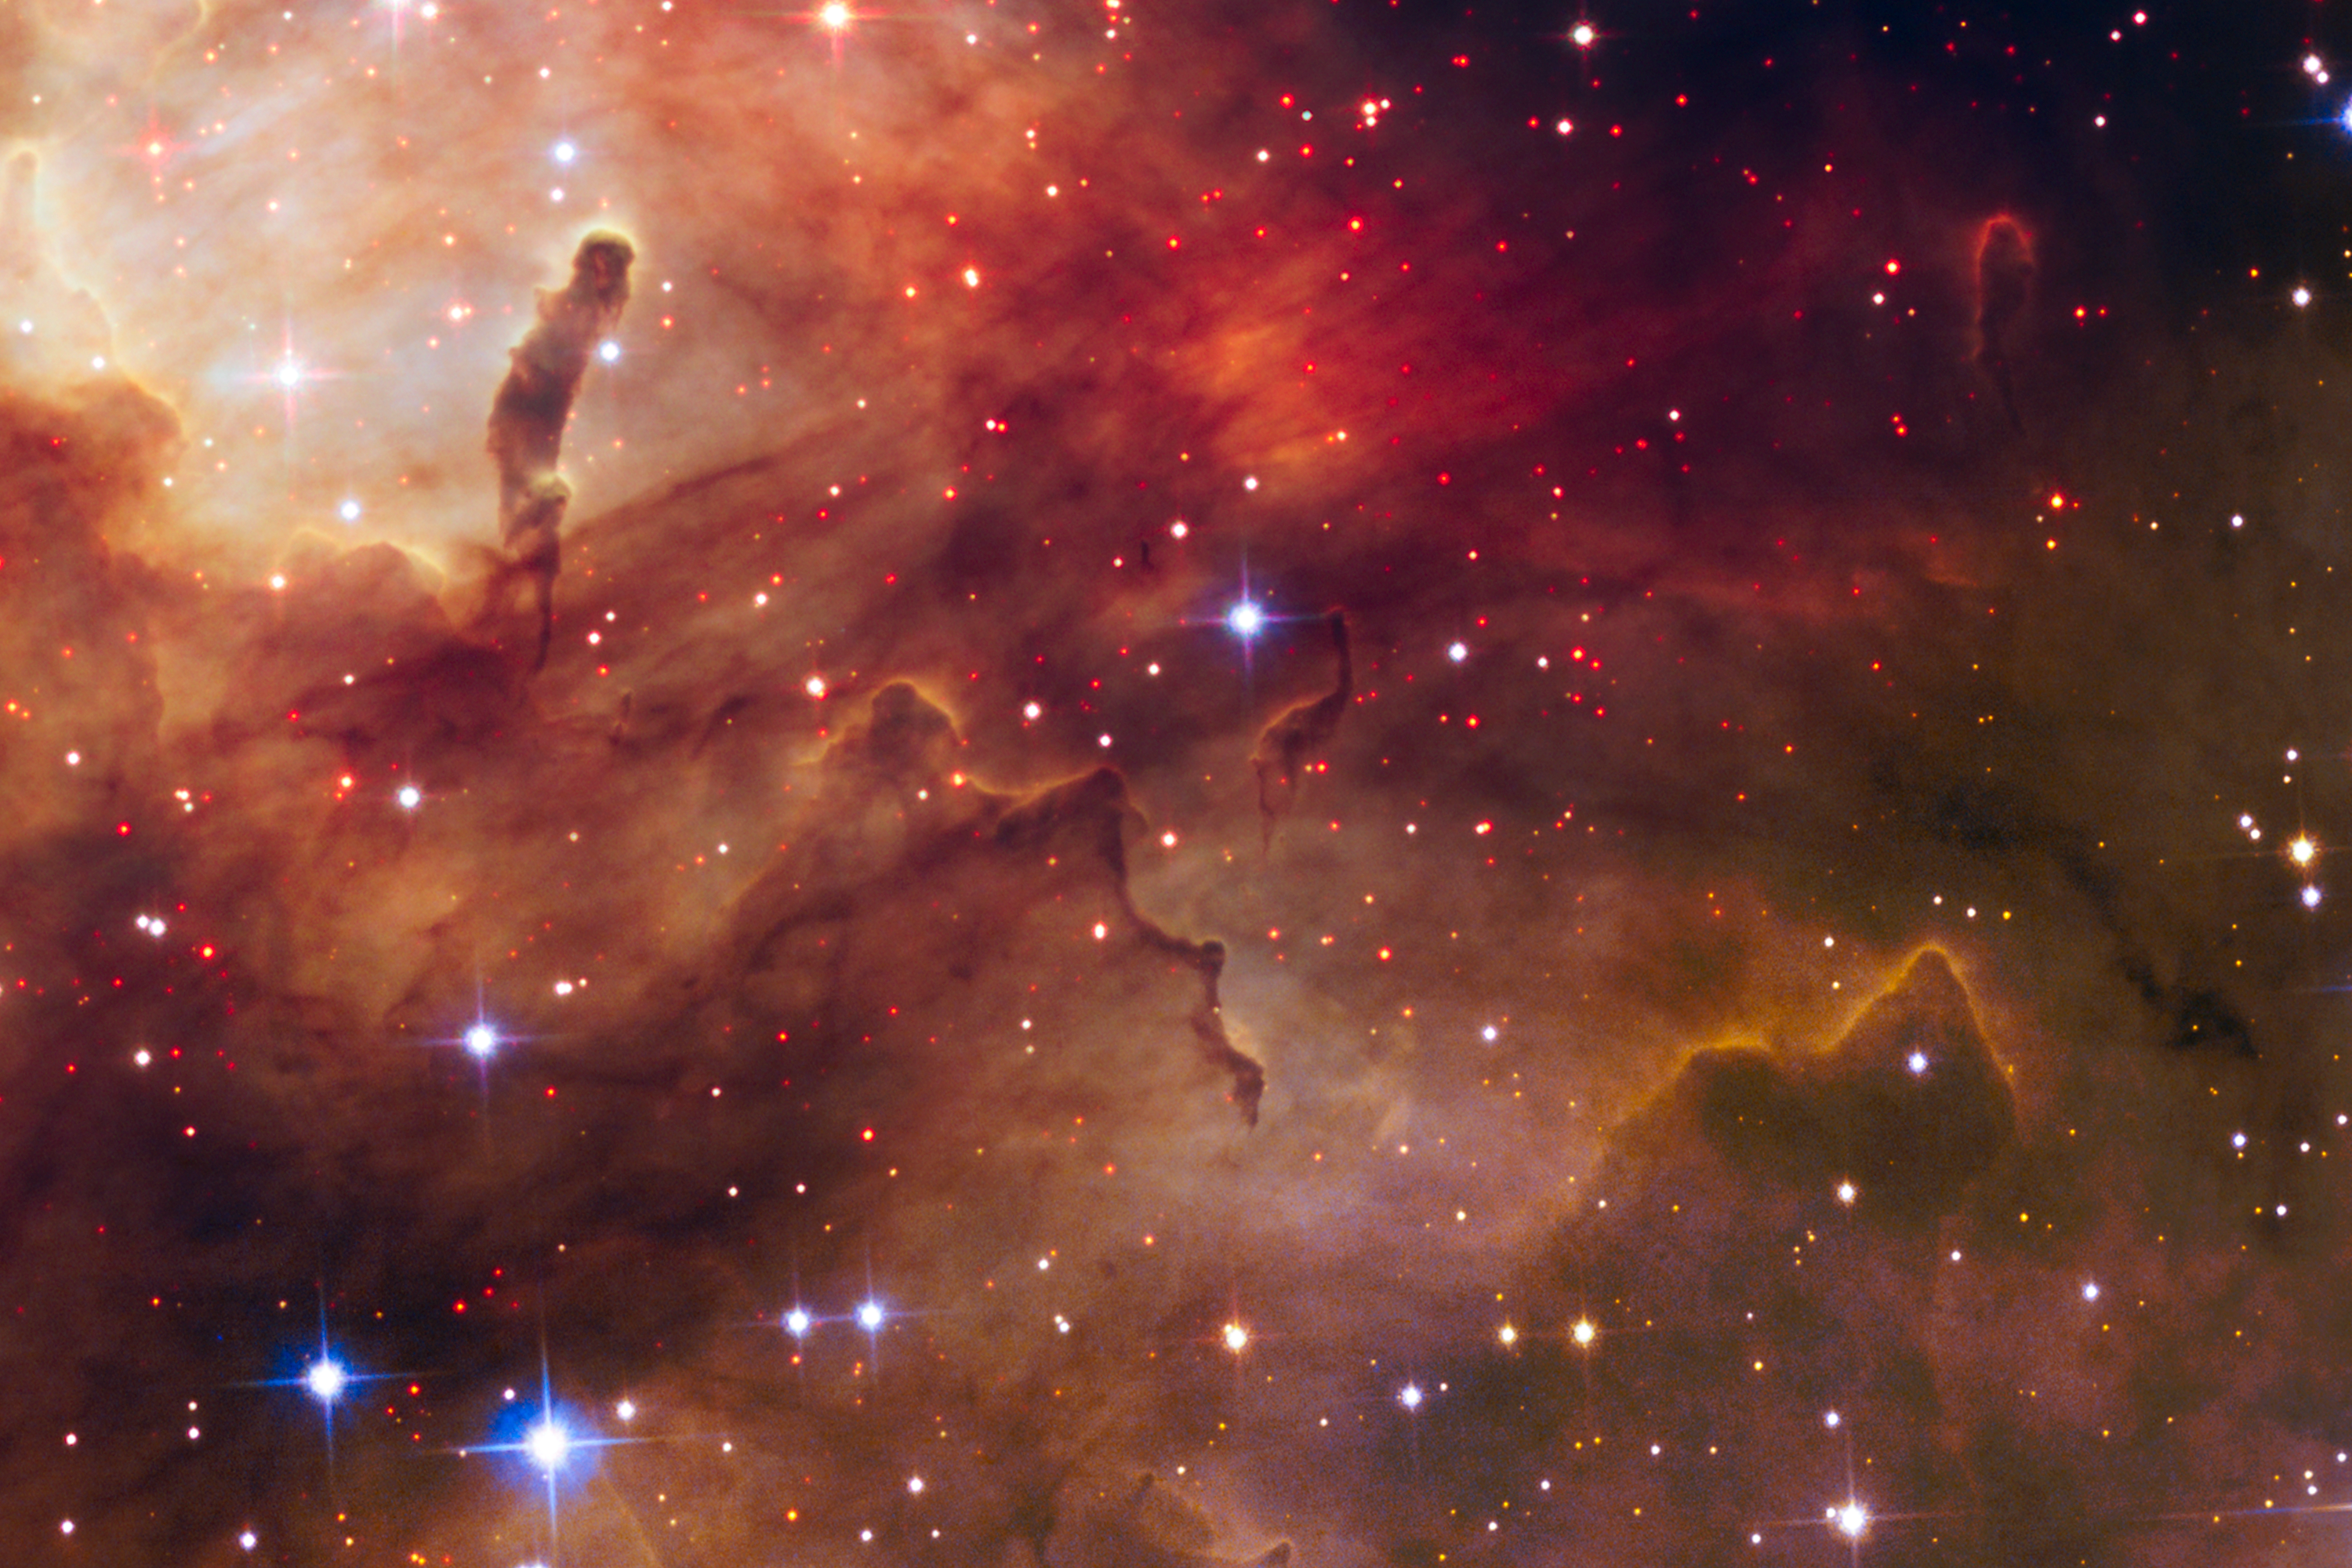

New stars around Westerlund 2

The red dots scattered throughout the cosmic landscape captured in this NASA/ESA Hubble Space Telescope image are a rich population of forming stars that are still wrapped in their gas and dust cocoons.

These stellar foetuses have not yet ignited the hydrogen in their cores to light-up as stars. However, Hubble’s near-infrared vision allows astronomers to identify these fledglings. The brilliant blue stars seen throughout the image are mostly in the foreground.

This is a section of the new NASA/ESA Hubble Space Telescope image of Westerlund 2 and its surroundings, released to celebrate Hubble’s 25th anniversary.

Credit: NASA, ESA, the Hubble Heritage Team (STScI/AURA), A. Nota (ESA/STScI), and the Westerlund 2 Science Team